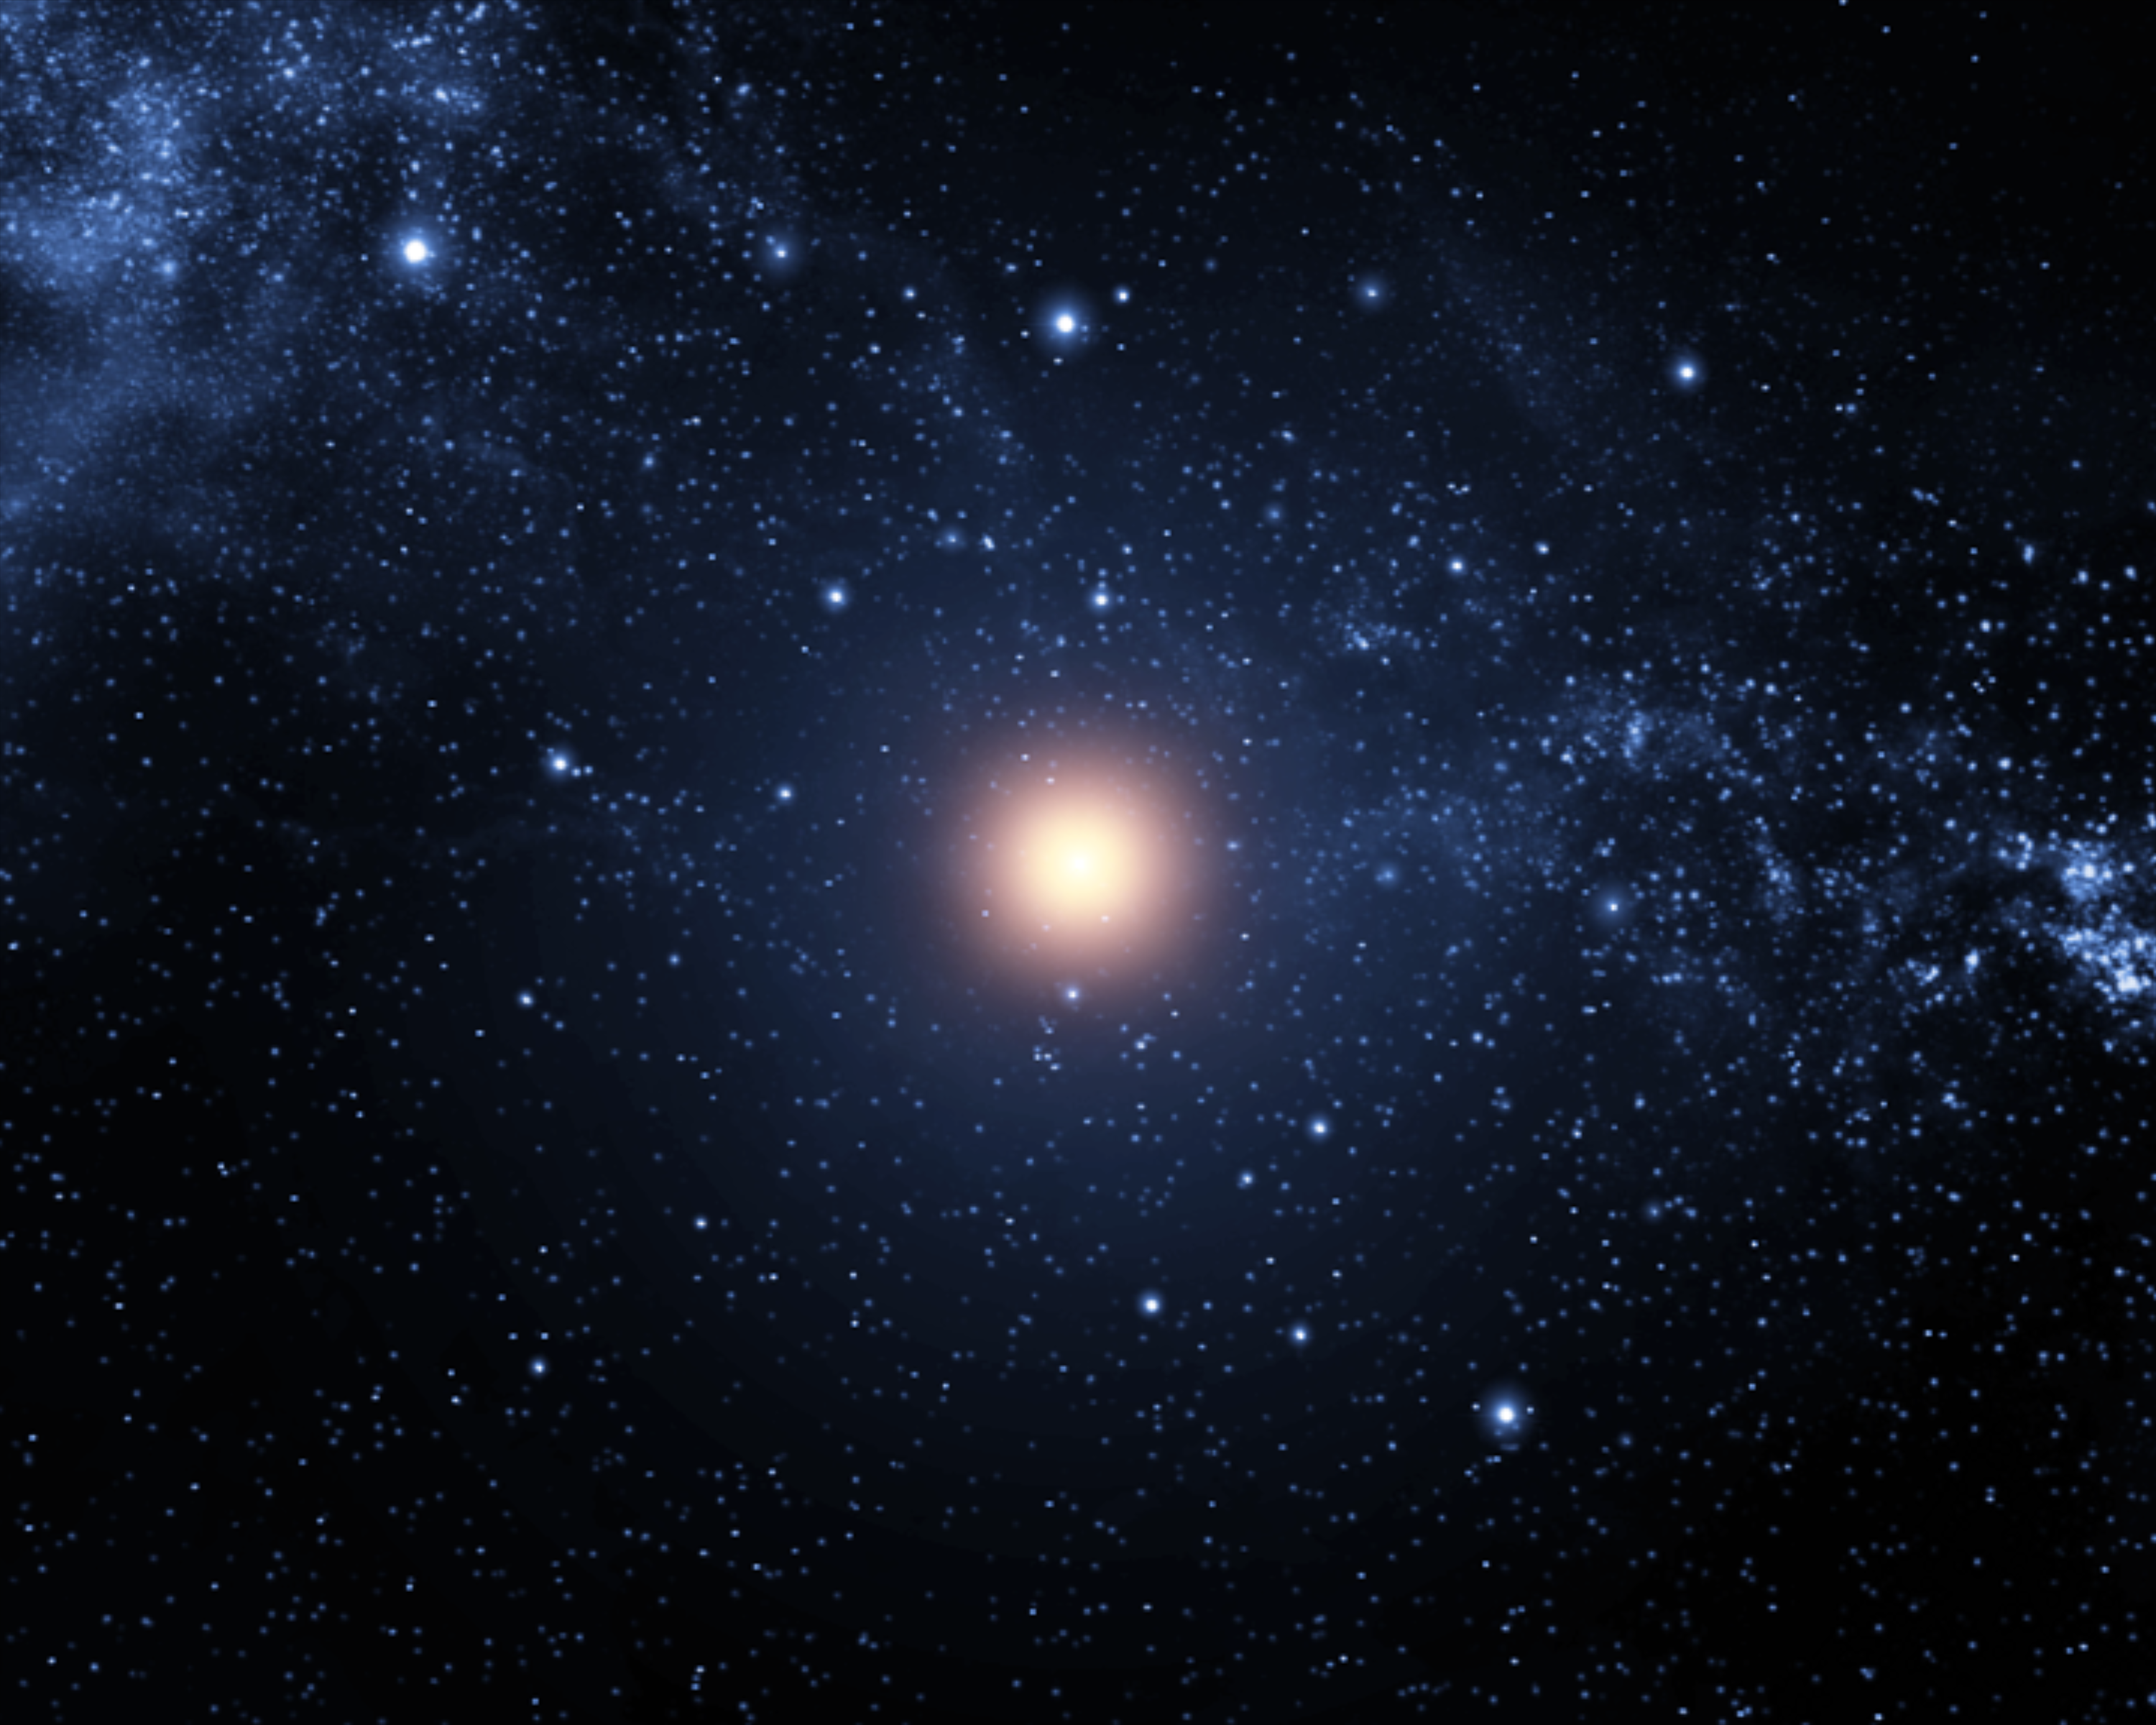

Animation still image 1 (artist's impression)

Still image from the animation of the 1054 supernova that created the Crab Nebula.

Credit: ESA/Hubble